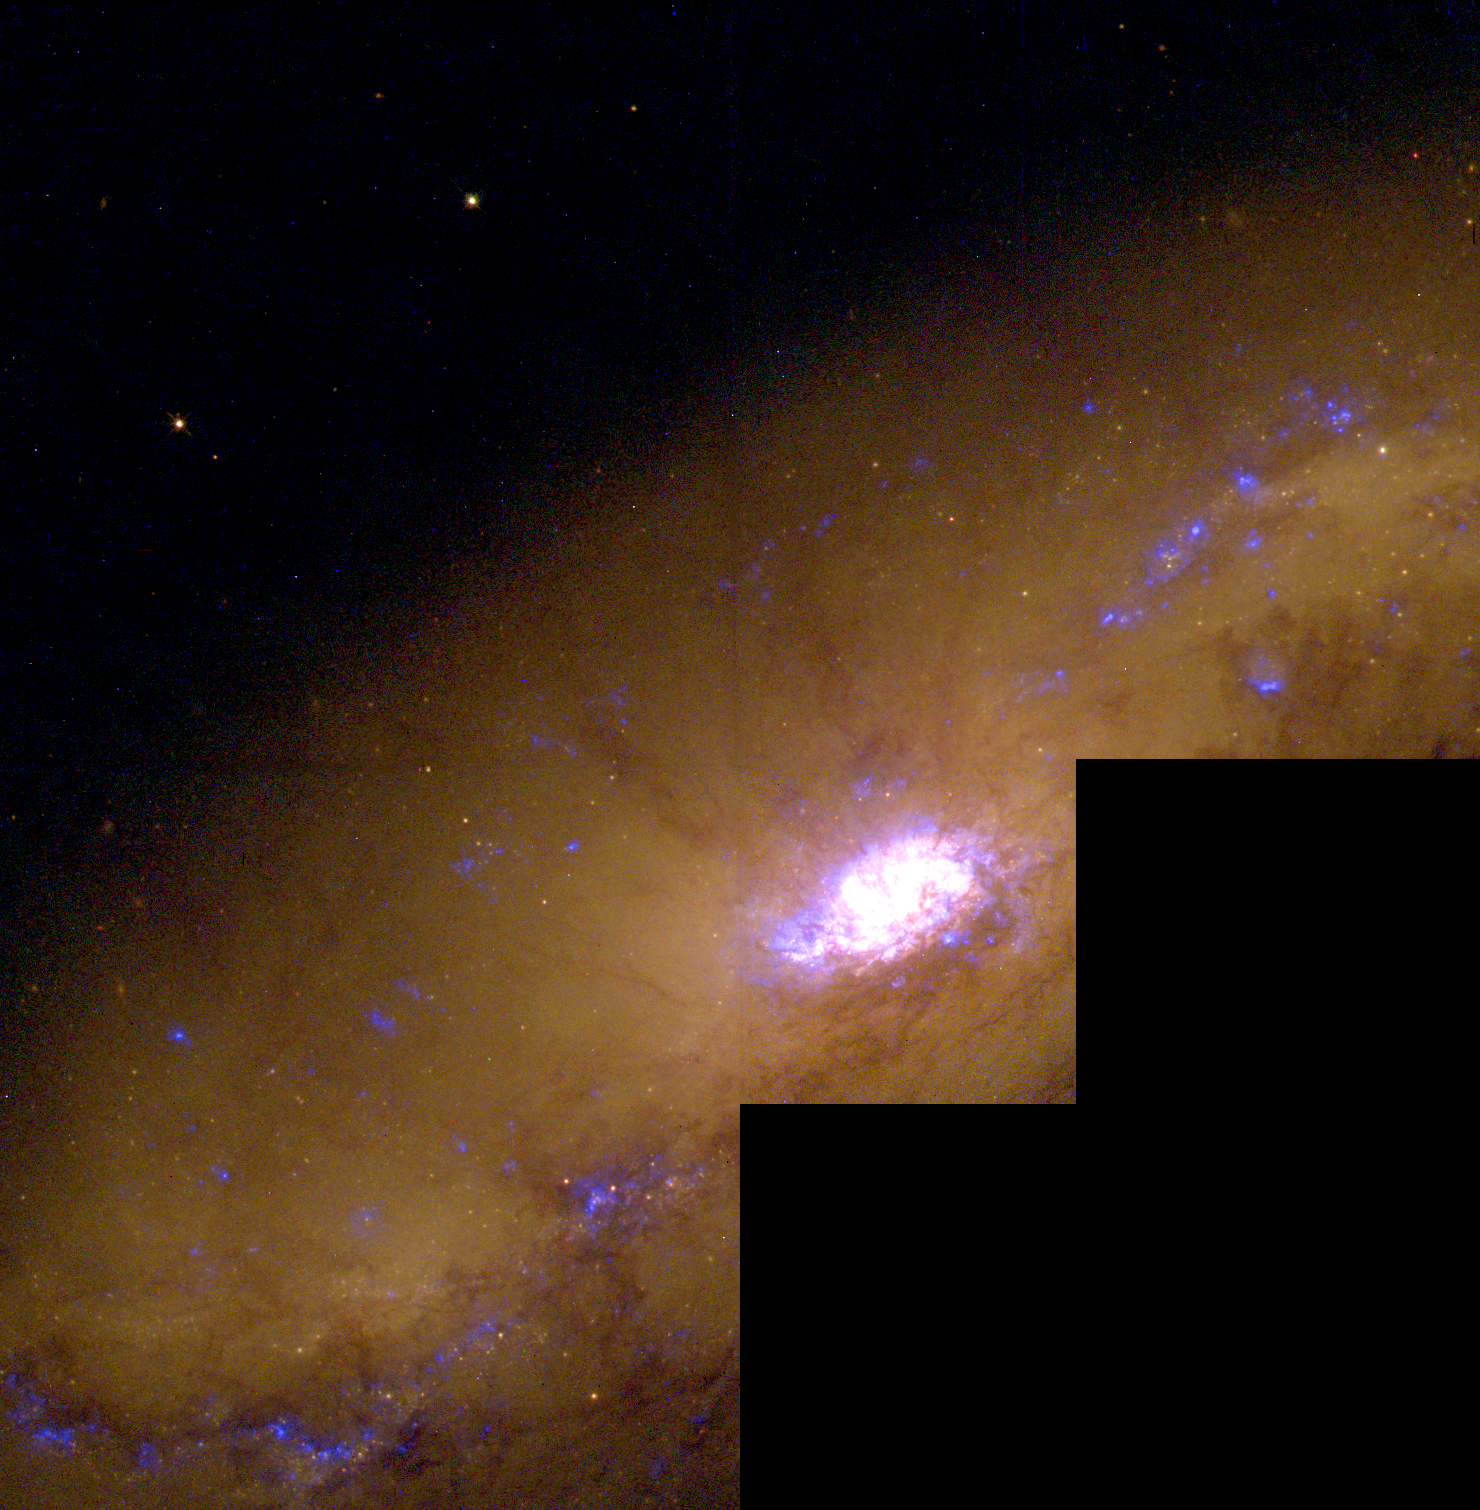

Starburst Galaxy NGC 1808

This image, taken with the Hubble telescope's Wide Field and Planetary Camera 2(WFPC2), provides a close-up view of the galaxy's center, the hotbed of vigorous star formation.

Credit: Jim Flood, an amateur astronomer affiliated with Sperry Observatory at Union College in New Jersey, and Max Mutchler, a member of the Space Telescope Science Institute staff who volunteered to work with Jim